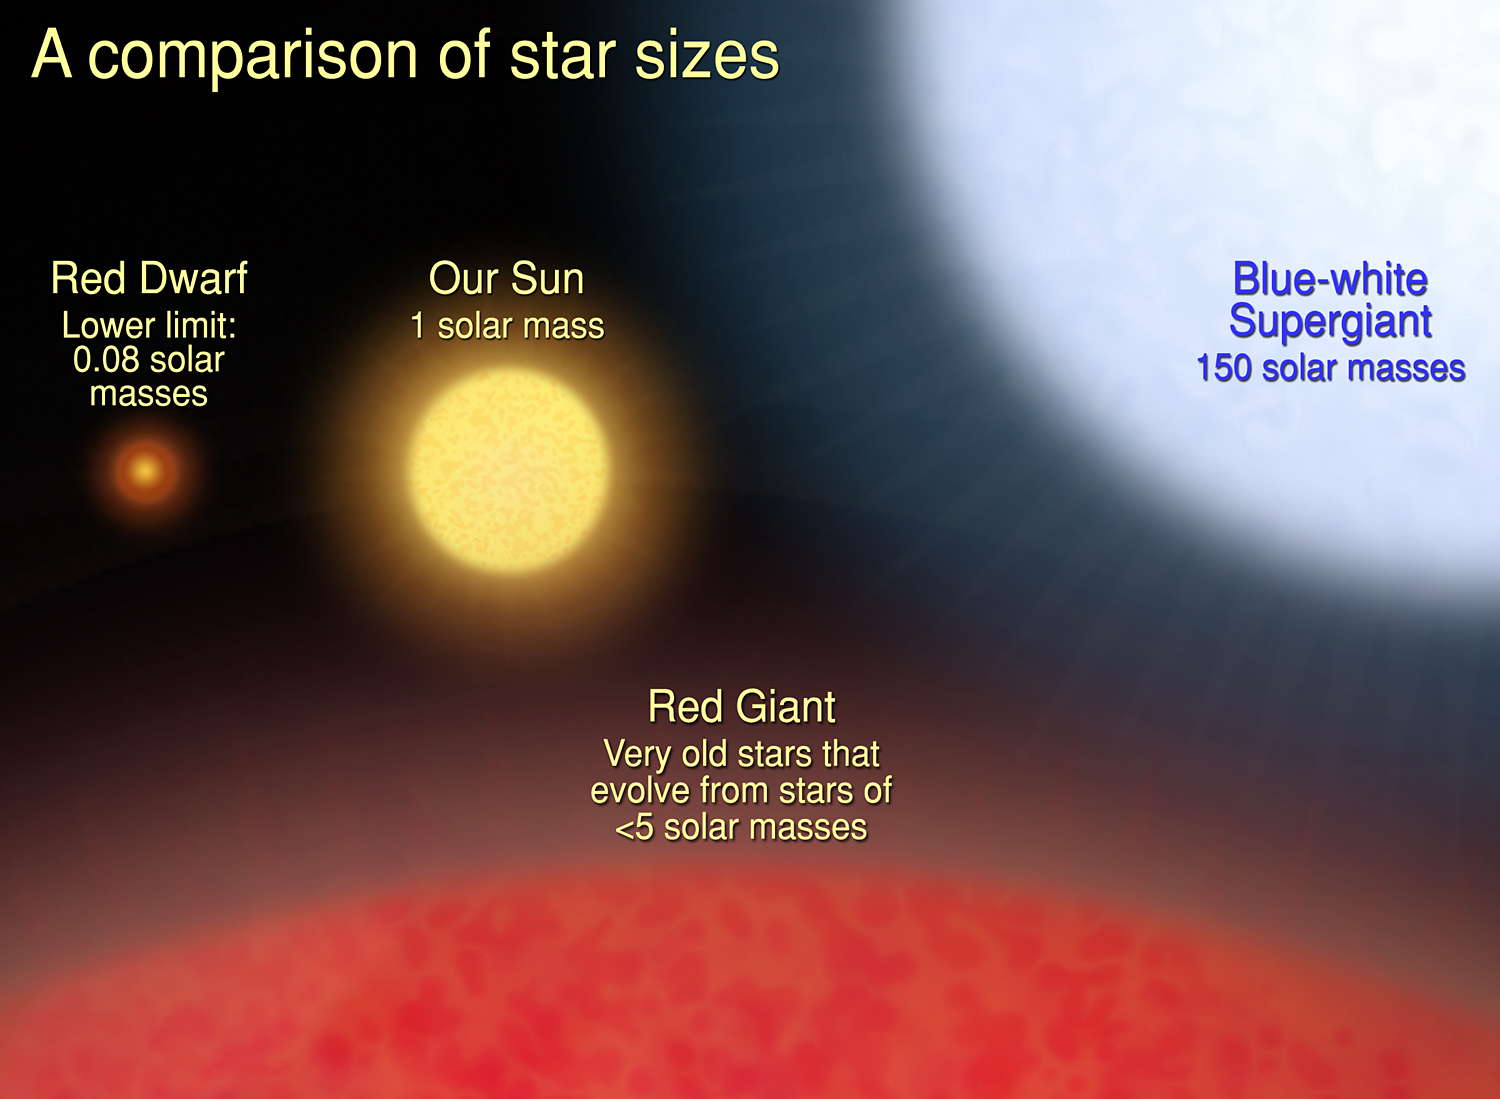

A Comparison of Star Sizes

This illustration compares the different masses of stars. The lightest-weight stars are red dwarfs. They can be as small as one-twelfth the mass of our Sun. The heaviest-weight stars are blue-white super giants. They may get as large as 150 solar masses. Our Sun is between the lightweight and heavyweight stars. The red giant star at the bottom of the graphic is much larger than the other stars in the illustration. Its mass, however, can range from a fraction of the Sun's mass to a few solar masses. A red giant is a bloated star near the end of its life. In this brief phase, a star's diameter expands to several times its normal girth.

Credit: NASA, ESA and A. Feild (STScI)